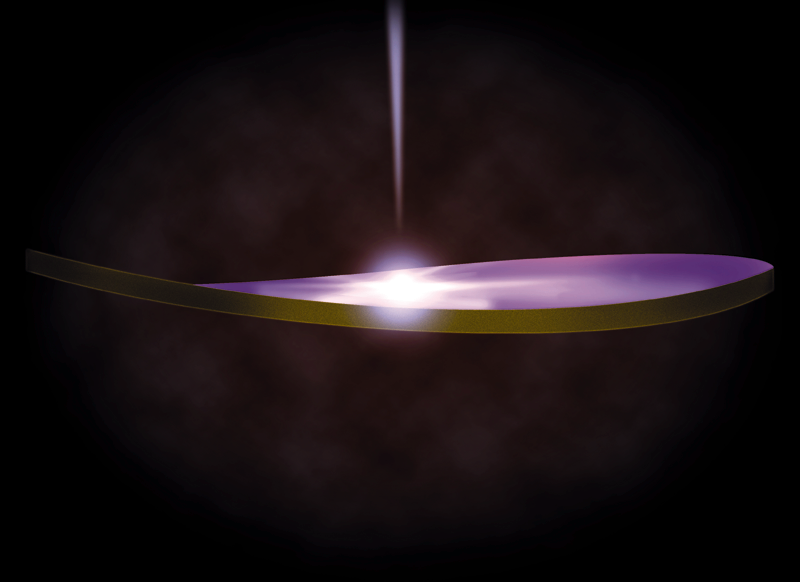

Warped Disk Around A Bright Black Hole (Artwork)

This diagram shows the geometry of a warped disk of dust surrounding a suspected black hole in the active galaxy NGC 6251. The diagram is based on NASA/ESA Hubble Space Telescope images of the disk which reveal that only one side reflects light emitted from a suspected black hole, hence the disk is warped.

Credit: James Gitlin ( Space Telescope Science Institute)